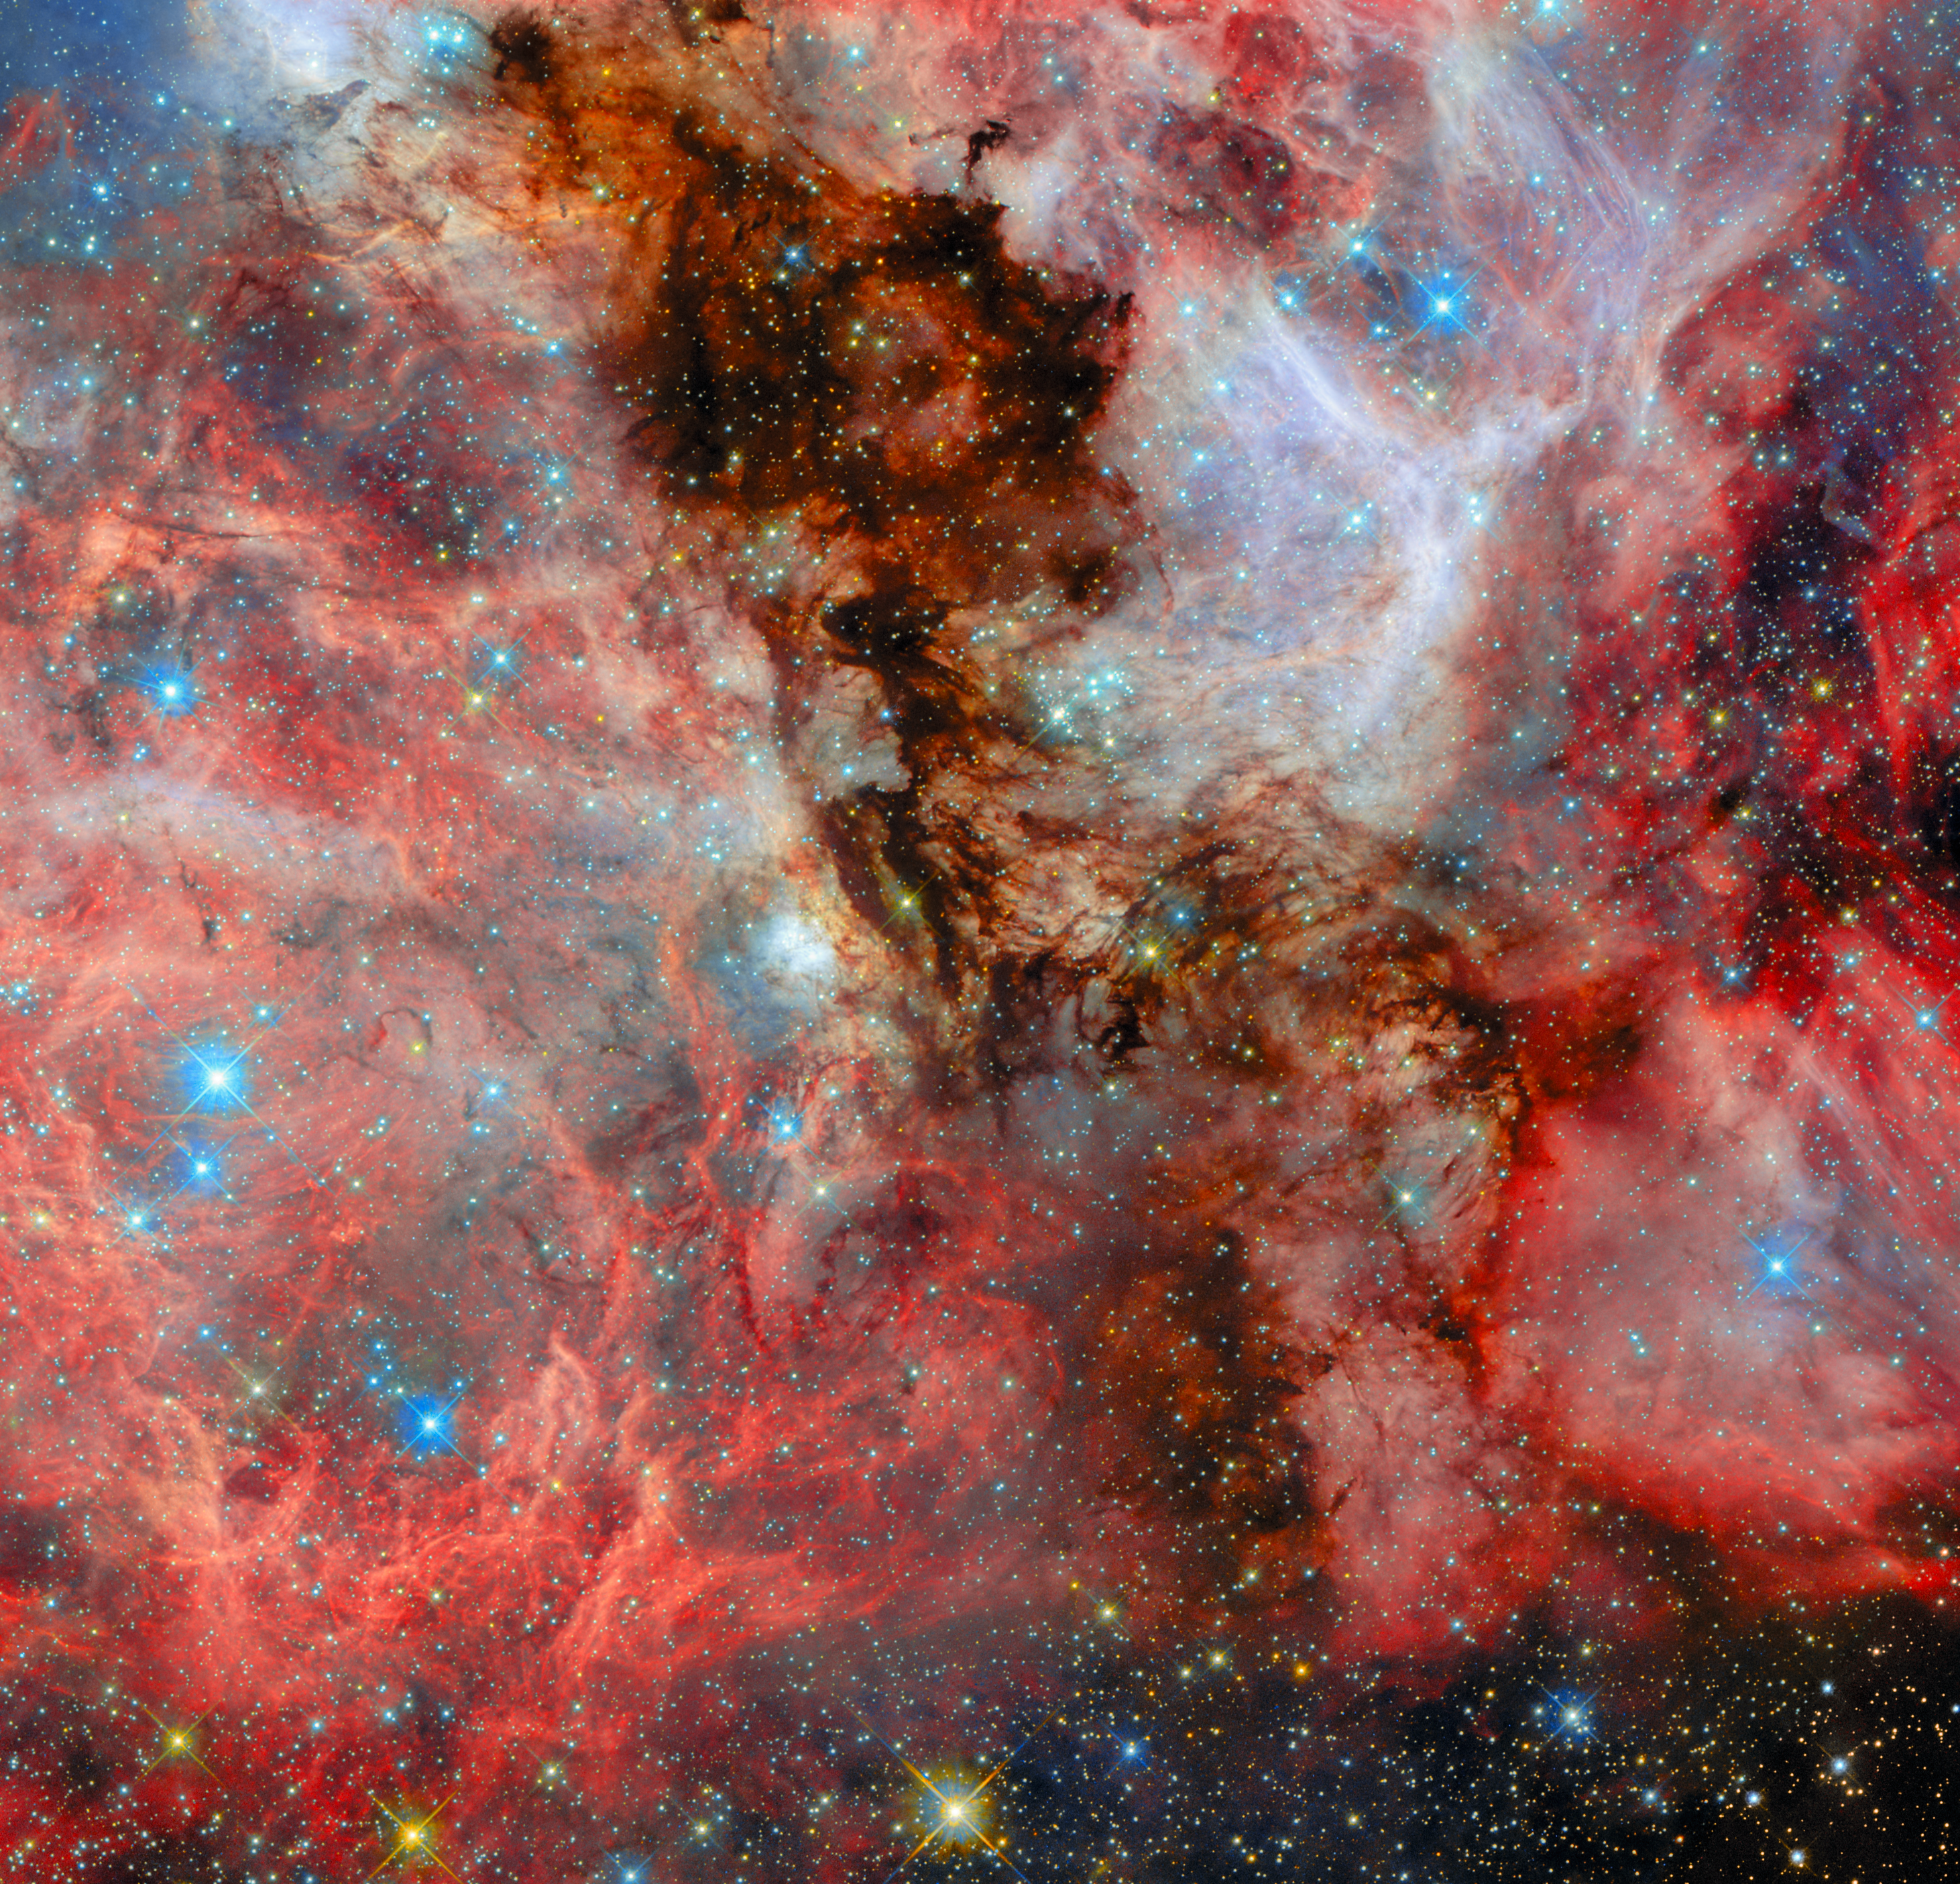

A neighbouring vista of stellar birth

Today’s ESA/Hubble Picture of the Week highlights another view of a distant stellar birthplace. Captured in a parallel field to a recently released image, this scene reveals a neighbouring region of the N159 star-forming complex in the Large Magellanic Cloud, approximately 160 000 light-years away.

Thick clouds of cold hydrogen gas dominate the scene, forming a complex network of ridges, cavities, and glowing filaments. Embedded within these dense clouds, newly formed stars begin to shine, their intense radiation causing the surrounding hydrogen to glow in deep red tones.

The brightest regions mark the presence of hot, massive young stars whose powerful stellar winds and energetic light reshape their environment. These forces carve out bubble-like structures and hollowed cavities in the gas, clear signatures of stellar feedback in action. Dark clouds in the foreground are lit from behind by new stars. Together, the glowing clouds and sculpted bubbles reveal a dynamic interplay between star formation and the material from which stars are born, capturing the ongoing cycle of creation and transformation within this neighbouring galactic system.

N159 is one of the most massive star-forming clouds in the Large Magellanic Cloud, a dwarf galaxy that is the largest of the small galaxies that orbit the Milky Way. This image shows just a portion of this expansive star-forming complex, as the entire complex stretches over 150 light-years across.

Credit: ESA/Hubble & NASA, R. Indebetouw